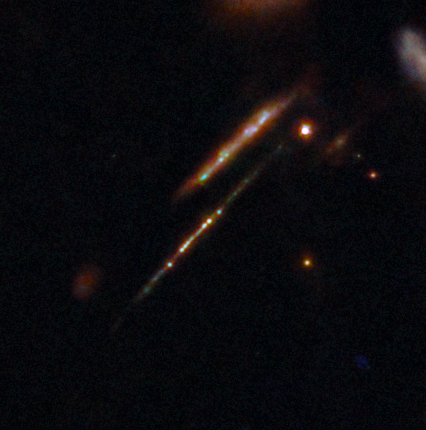

Star clusters in the Cosmic Gems arc (cropped)

An international team of astronomers have used the NASA/ESA/CSA James Webb Space Telescope to discover gravitationally bound star clusters when the Universe was 460 million years old. This is the first discovery of star clusters in an infant galaxy less than 500 million years after the Big bang.

Young galaxies in the early Universe underwent significant burst phases of star formation, generating substantial amounts of ionising radiation. However, because of their cosmological distances, direct studies of their stellar content have proven challenging. Using Webb, an international team of astronomers have now detected five young massive star clusters in the Cosmic Gems arc (SPT0615-JD1), a strongly-lensed galaxy emitting light when the Universe was roughly 460 million years old, looking back across 97% of cosmic time.

The Cosmic Gems arc was initially discovered in NASA/ESA Hubble Space Telescope images obtained by the RELICS (Reionization Lensing Cluster Survey) programme of the lensing galaxy cluster SPT-CL J0615−5746.

With Webb, the science team can now see where stars formed and how they are distributed, in a similar way to how the Hubble Space Telescope is used to study local galaxies. Webb’s view provides a unique opportunity to study star formation and the inner workings of infant galaxies at such an unprecedented distance.

Credit: ESA/Webb, NASA & CSA, L. Bradley (STScI), A. Adamo (Stockholm University) and the Cosmic Spring collaboration